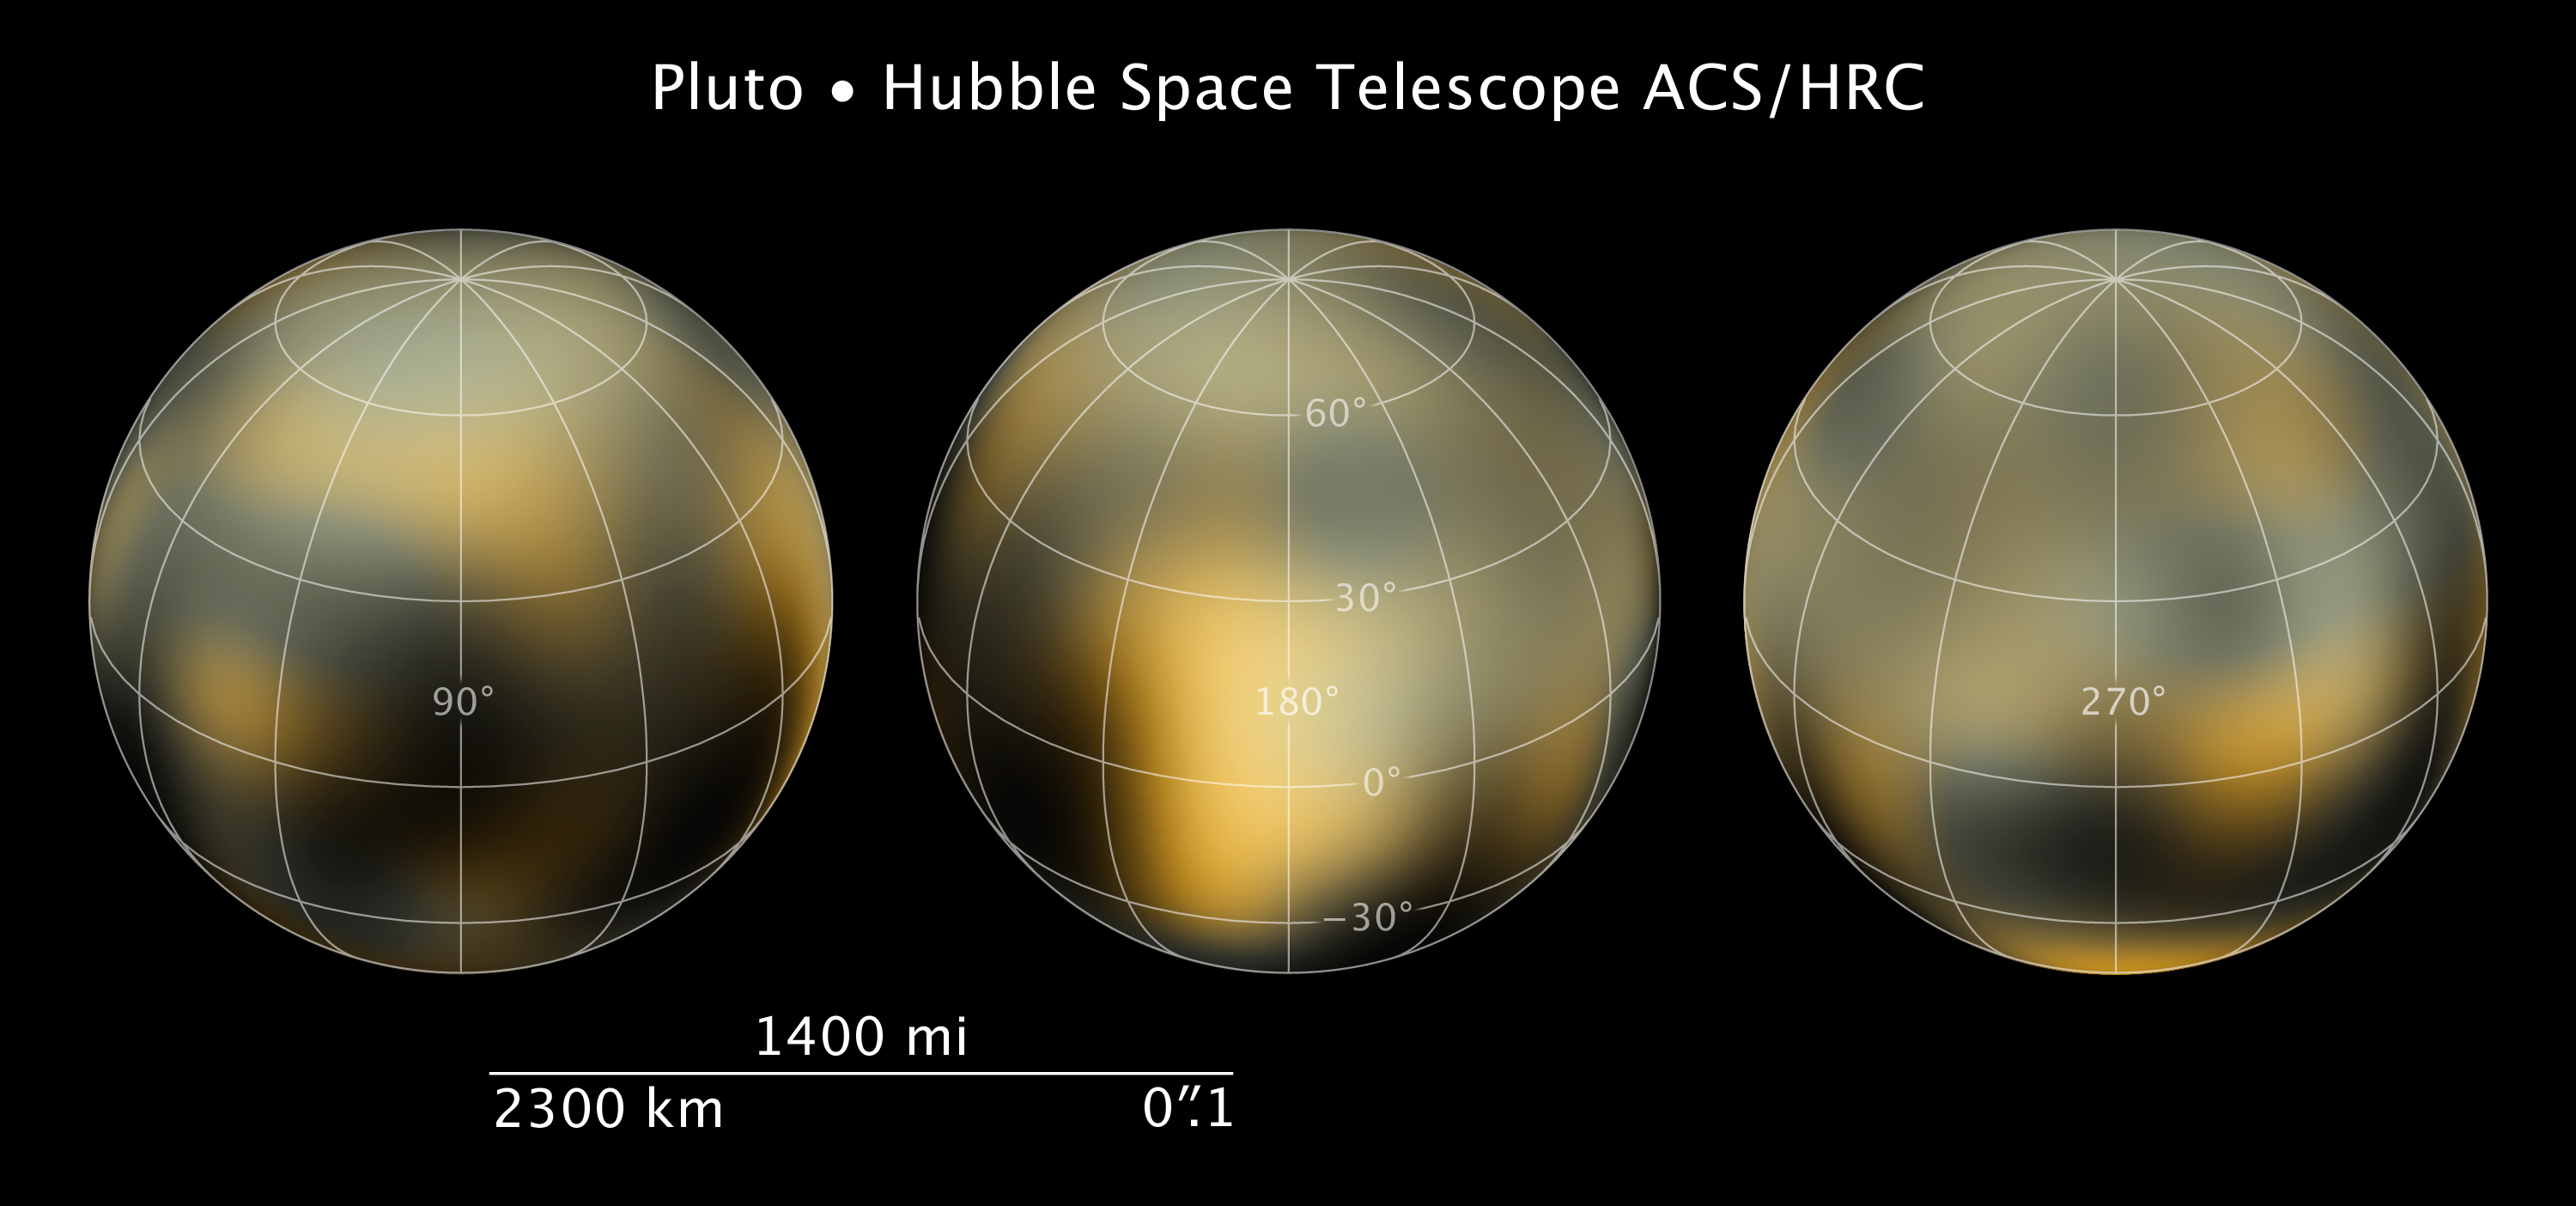

Compass and scale image for Pluto

Compass and scale image for Pluto.

Credit: Illustration: NASA, ESA and Z. Levay (STScI). Science Credit: NASA, ESA and M. Buie (Southwest Research Institute).